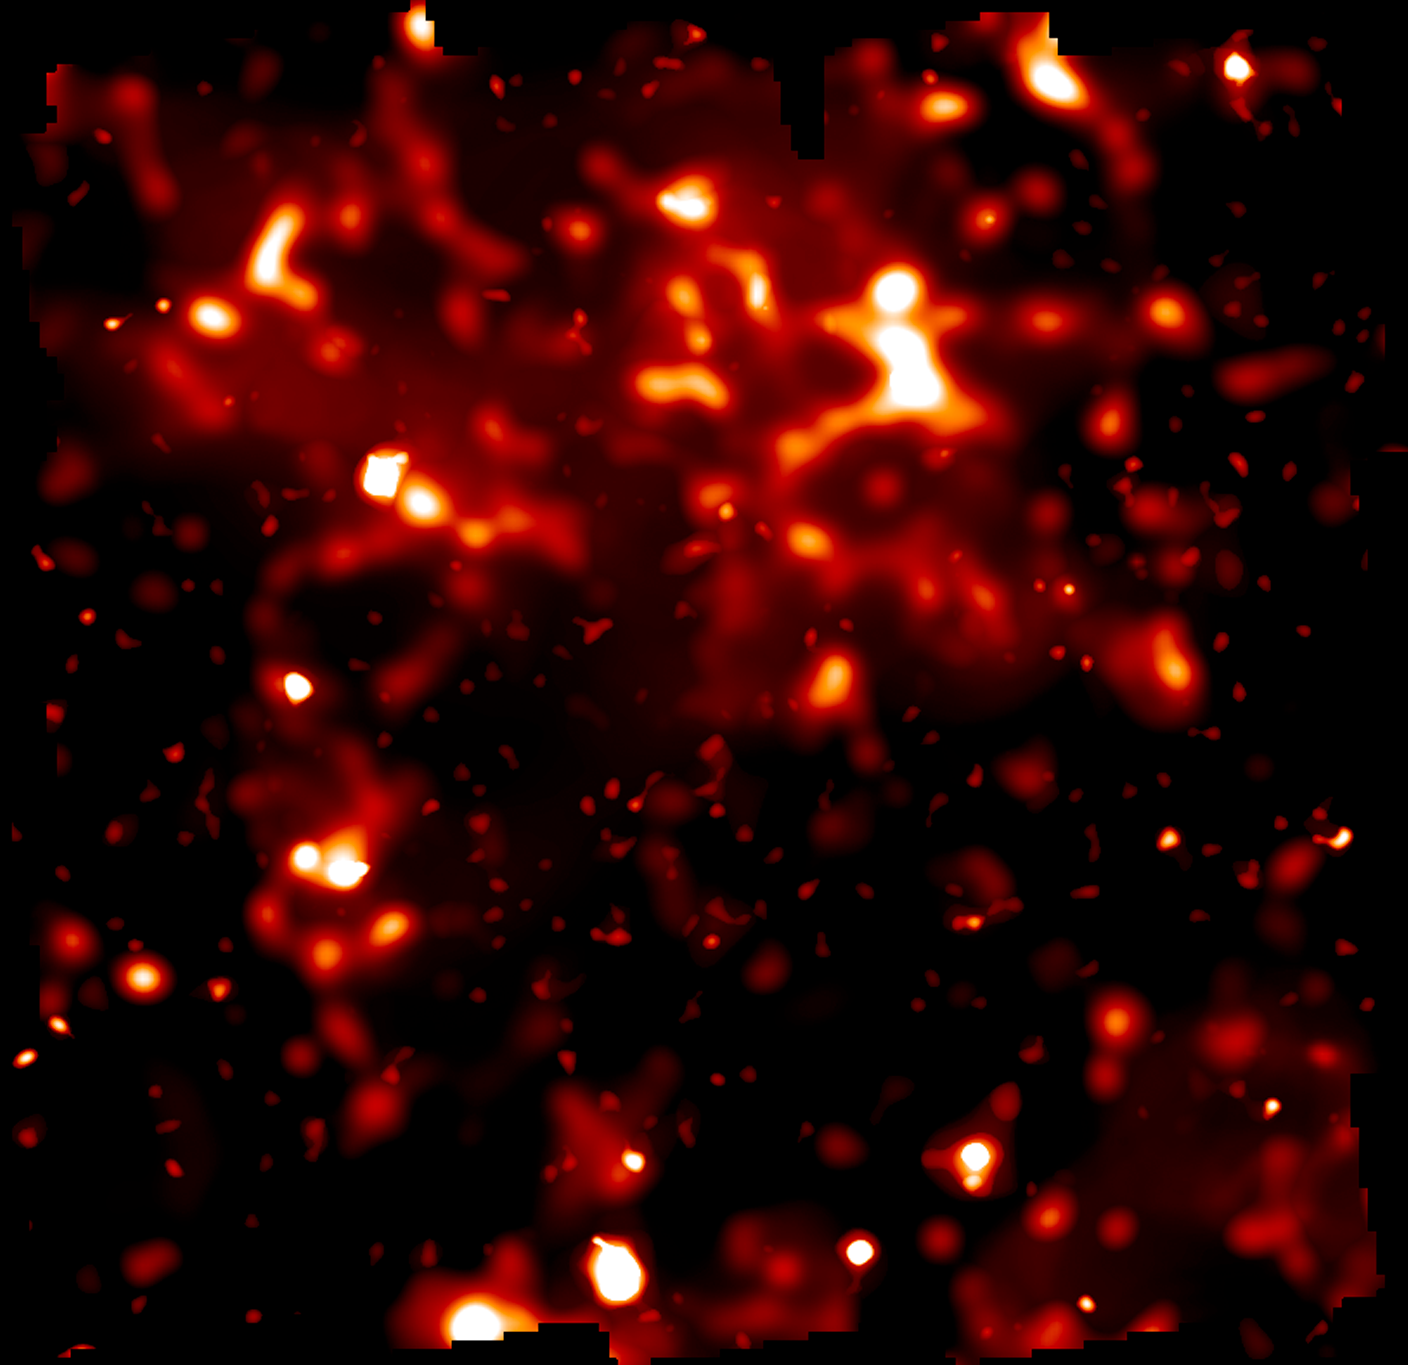

Large scale structure of normal matter

The distribution of normal matter in the COSMOS survey was determined mainly by the European Space Agency's XMM/Newton telescope. The brightness of clumps corresponds to the density of normal matter. The map covers an area of sky nine times the angular diameter of the full Moon. By comparing with the dark matter distribution the map demonstrates how normal matter - including stars, galaxies and gas - is built inside an underlying scaffolding of dark matter. The comparison of dark matter and normal matter will provide critical observational underpinnings to future theories for how structure formed in the evolving Universe under the relentless pull of gravity.

Credit: NASA, ESA and R. Massey (California Institute of Technology)